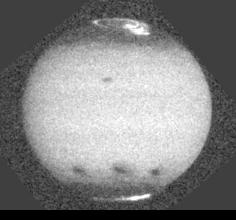

Jupiter comet impact

This image shows the aftermath of comet P/Shoemaker-Levy 9's impact with Jupiter. The impact sites of fragments C, A and E are visible on the southern hemisphere, from left to right and this image was taken about 12, 23, and 4 hours after each collision. Jupiter's satellite 10 is seen crossing above the center of the disk, and the famous Great Red Spot is near the eastern limb.

Credit: NASA & ESA